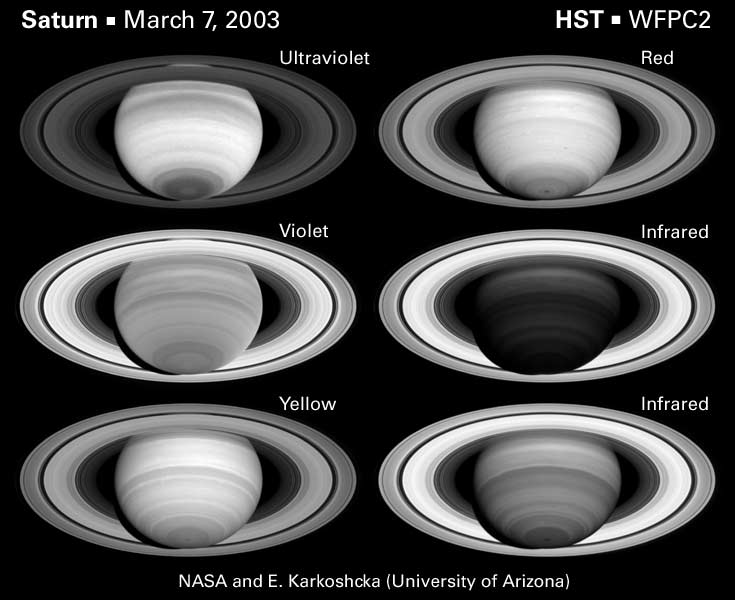

The spectrally changing face of saturn

This set of images displays Saturn in six different wavelengths. Counterclockwise from top left, the wavelengths are in the ultraviolet, violet, yellow, deep red, and two in the near-infrared.

Even a quick look at the set of six images reveals the changing face of Saturn between different spectral regions. In the ultraviolet, Saturn is much brighter than the rings. The opposite is true at some near-infrared wavelengths. Saturn's bands change dramatically throughout the displayed spectral region.

Credit: NASA/ESA and E. Karkoschka (University of Arizona)